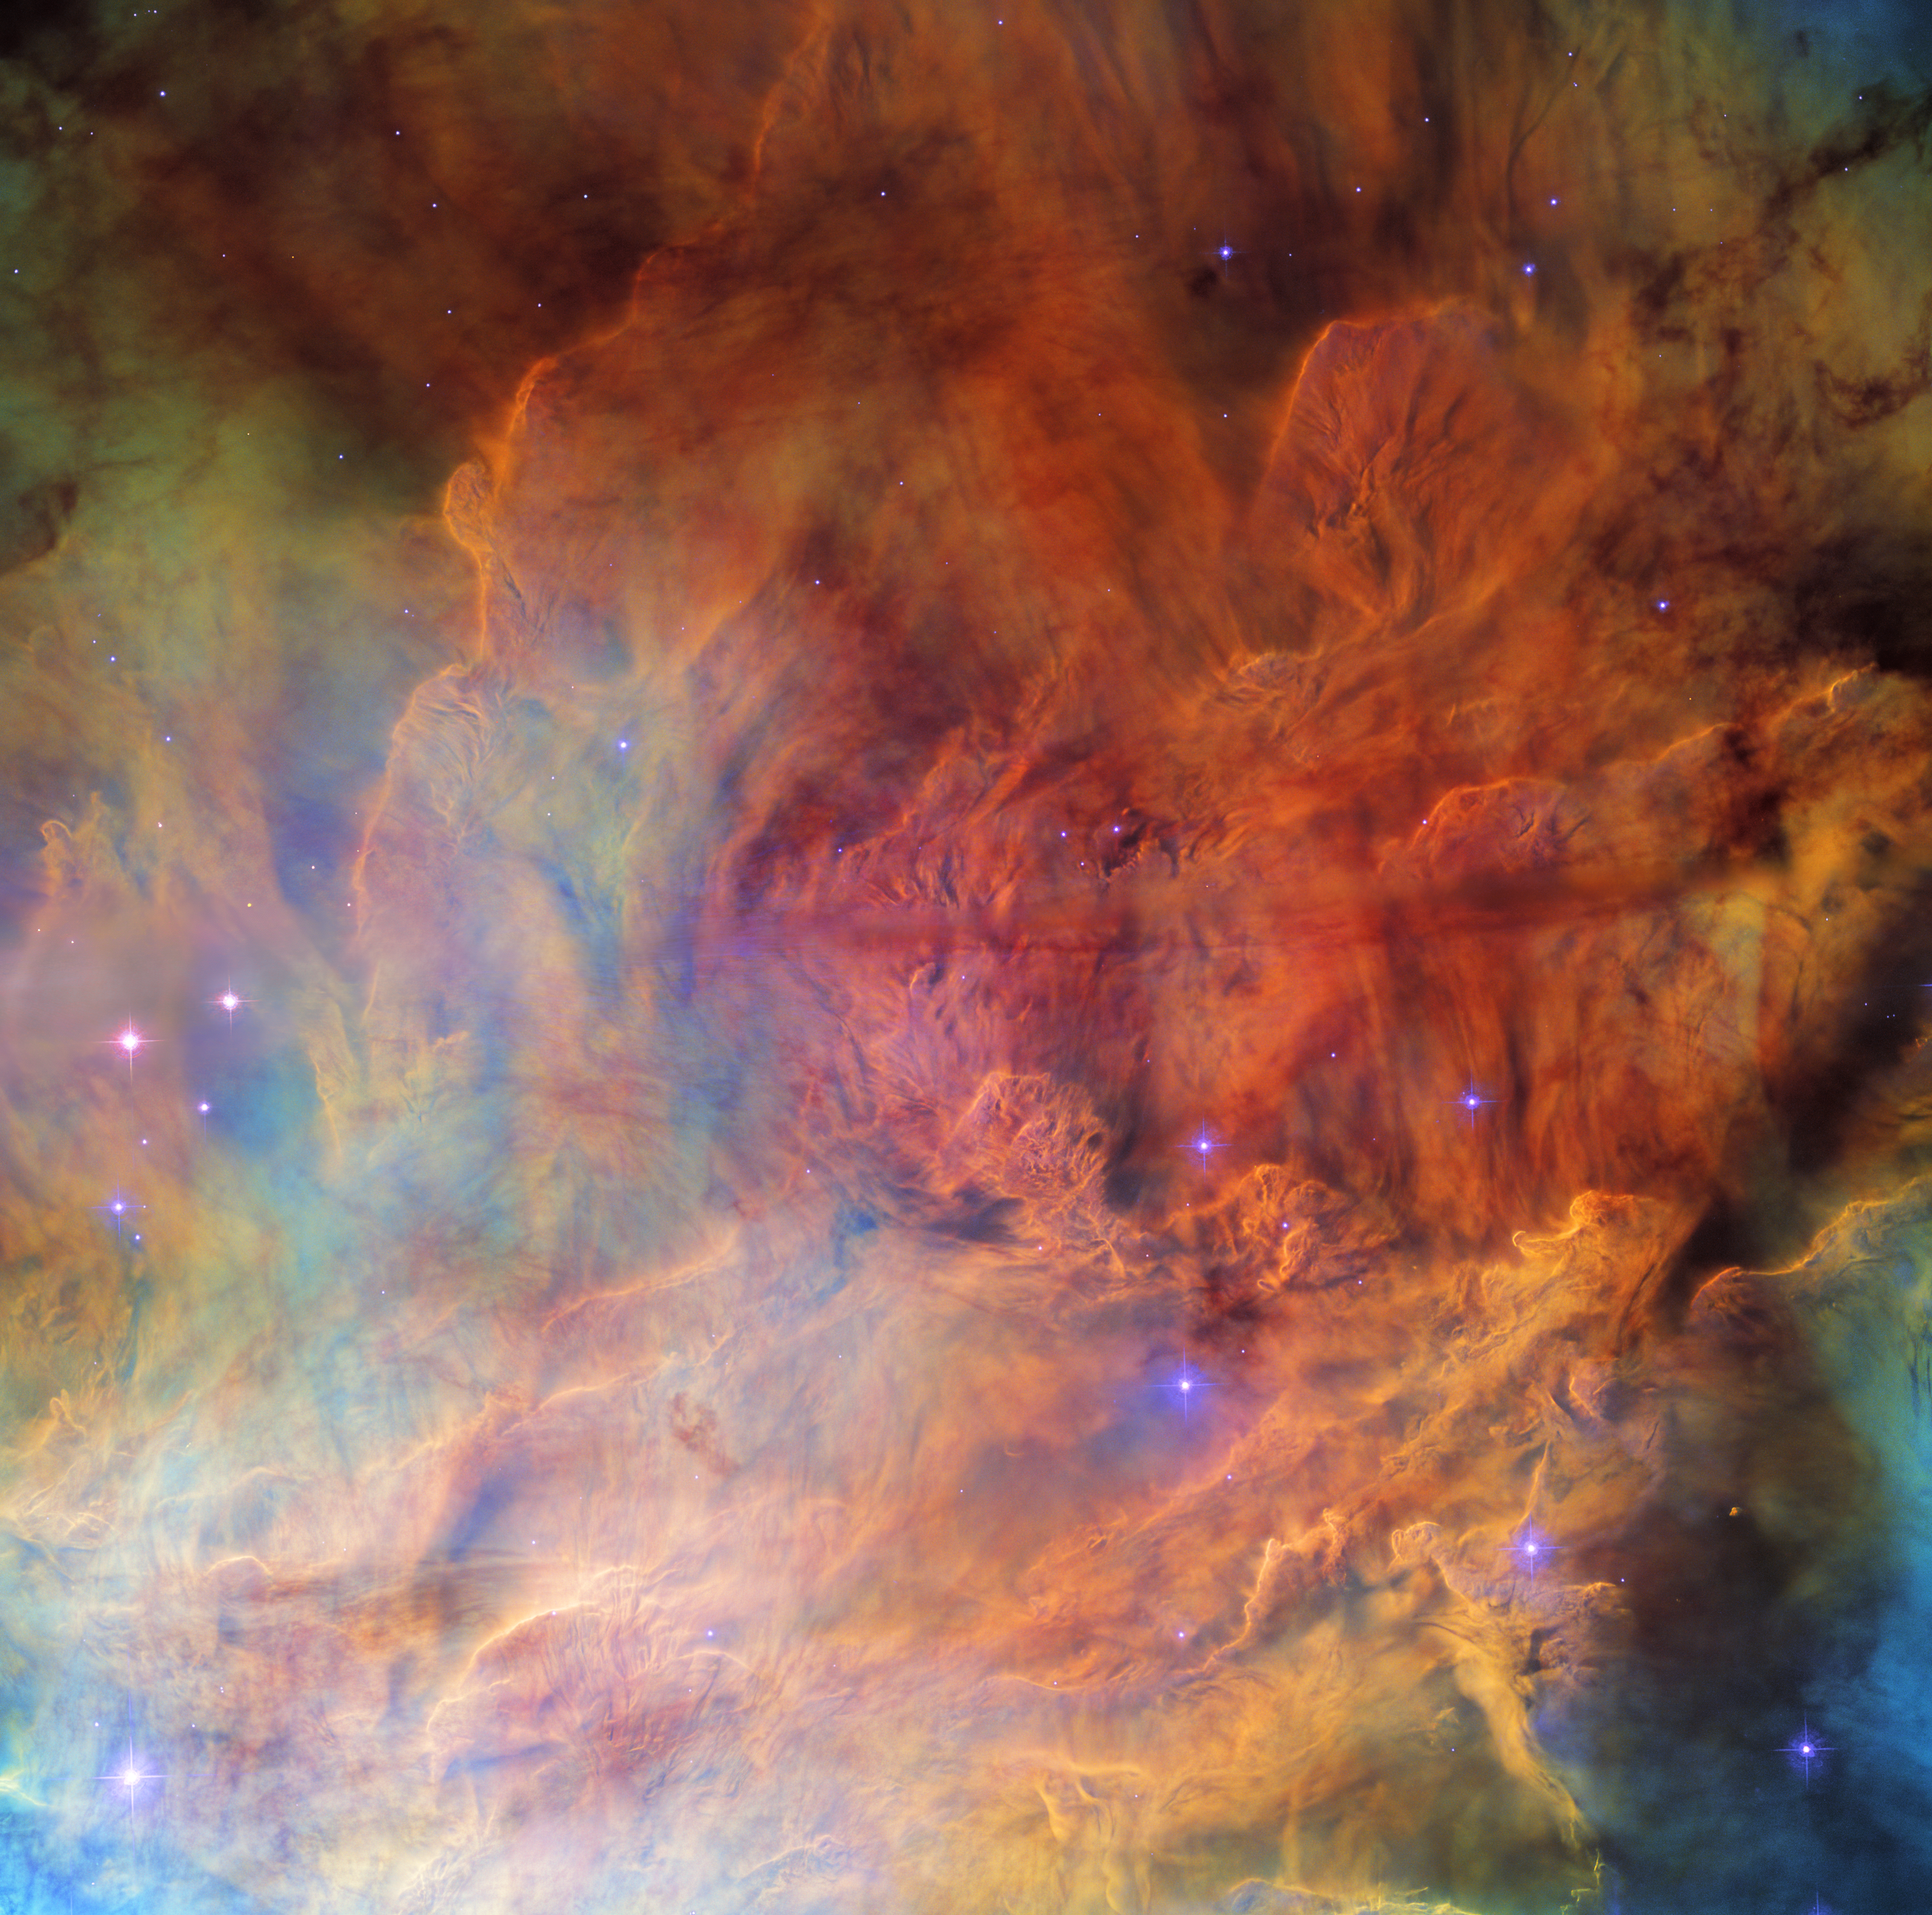

Cosmic Smokescreen

A portion of the open cluster NGC 6530 appears as a roiling wall of smoke studded with stars in this image from the NASA/ESA Hubble Space Telescope. NGC 6530 is a collection of several thousand stars lying around 4350 light-years from Earth in the constellation Sagittarius. The cluster is set within the larger Lagoon Nebula, a gigantic interstellar cloud of gas and dust. It is the nebula that gives this image its distinctly smokey appearance; clouds of interstellar gas and dust stretch from one side of this image to the other.

Astronomers investigated NGC 6530 using Hubble’s Advanced Camera for Surveys and Wide Field Planetary Camera 2. They scoured the region in the hope of finding new examples of proplyds, a particular class of illuminated protoplanetary discs surrounding newborn stars. The vast majority of proplyds have been found in only one region, the nearby Orion Nebula. This makes understanding their origin and lifetimes in other astronomical environments challenging.

Hubble’s ability to observe at infrared wavelengths — particularly with Wide Field Camera 3— have made it an indispensable tool for understanding starbirth and the origin of exoplanetary systems. In particular, Hubble was crucial to investigations of the proplyds around newly born stars in the Orion Nebula. The new NASA/ESA/CSA James Webb Space Telescope’s unprecedented observational capabilities at infrared wavelengths will complement Hubble observations by allowing astronomers to peer through the dusty envelopes around newly born stars and investigate the faintest, earliest stages of starbirth.

Credit: ESA/Hubble & NASA, ESO, O. De Marco Acknowledgement: M. H. Özsaraç